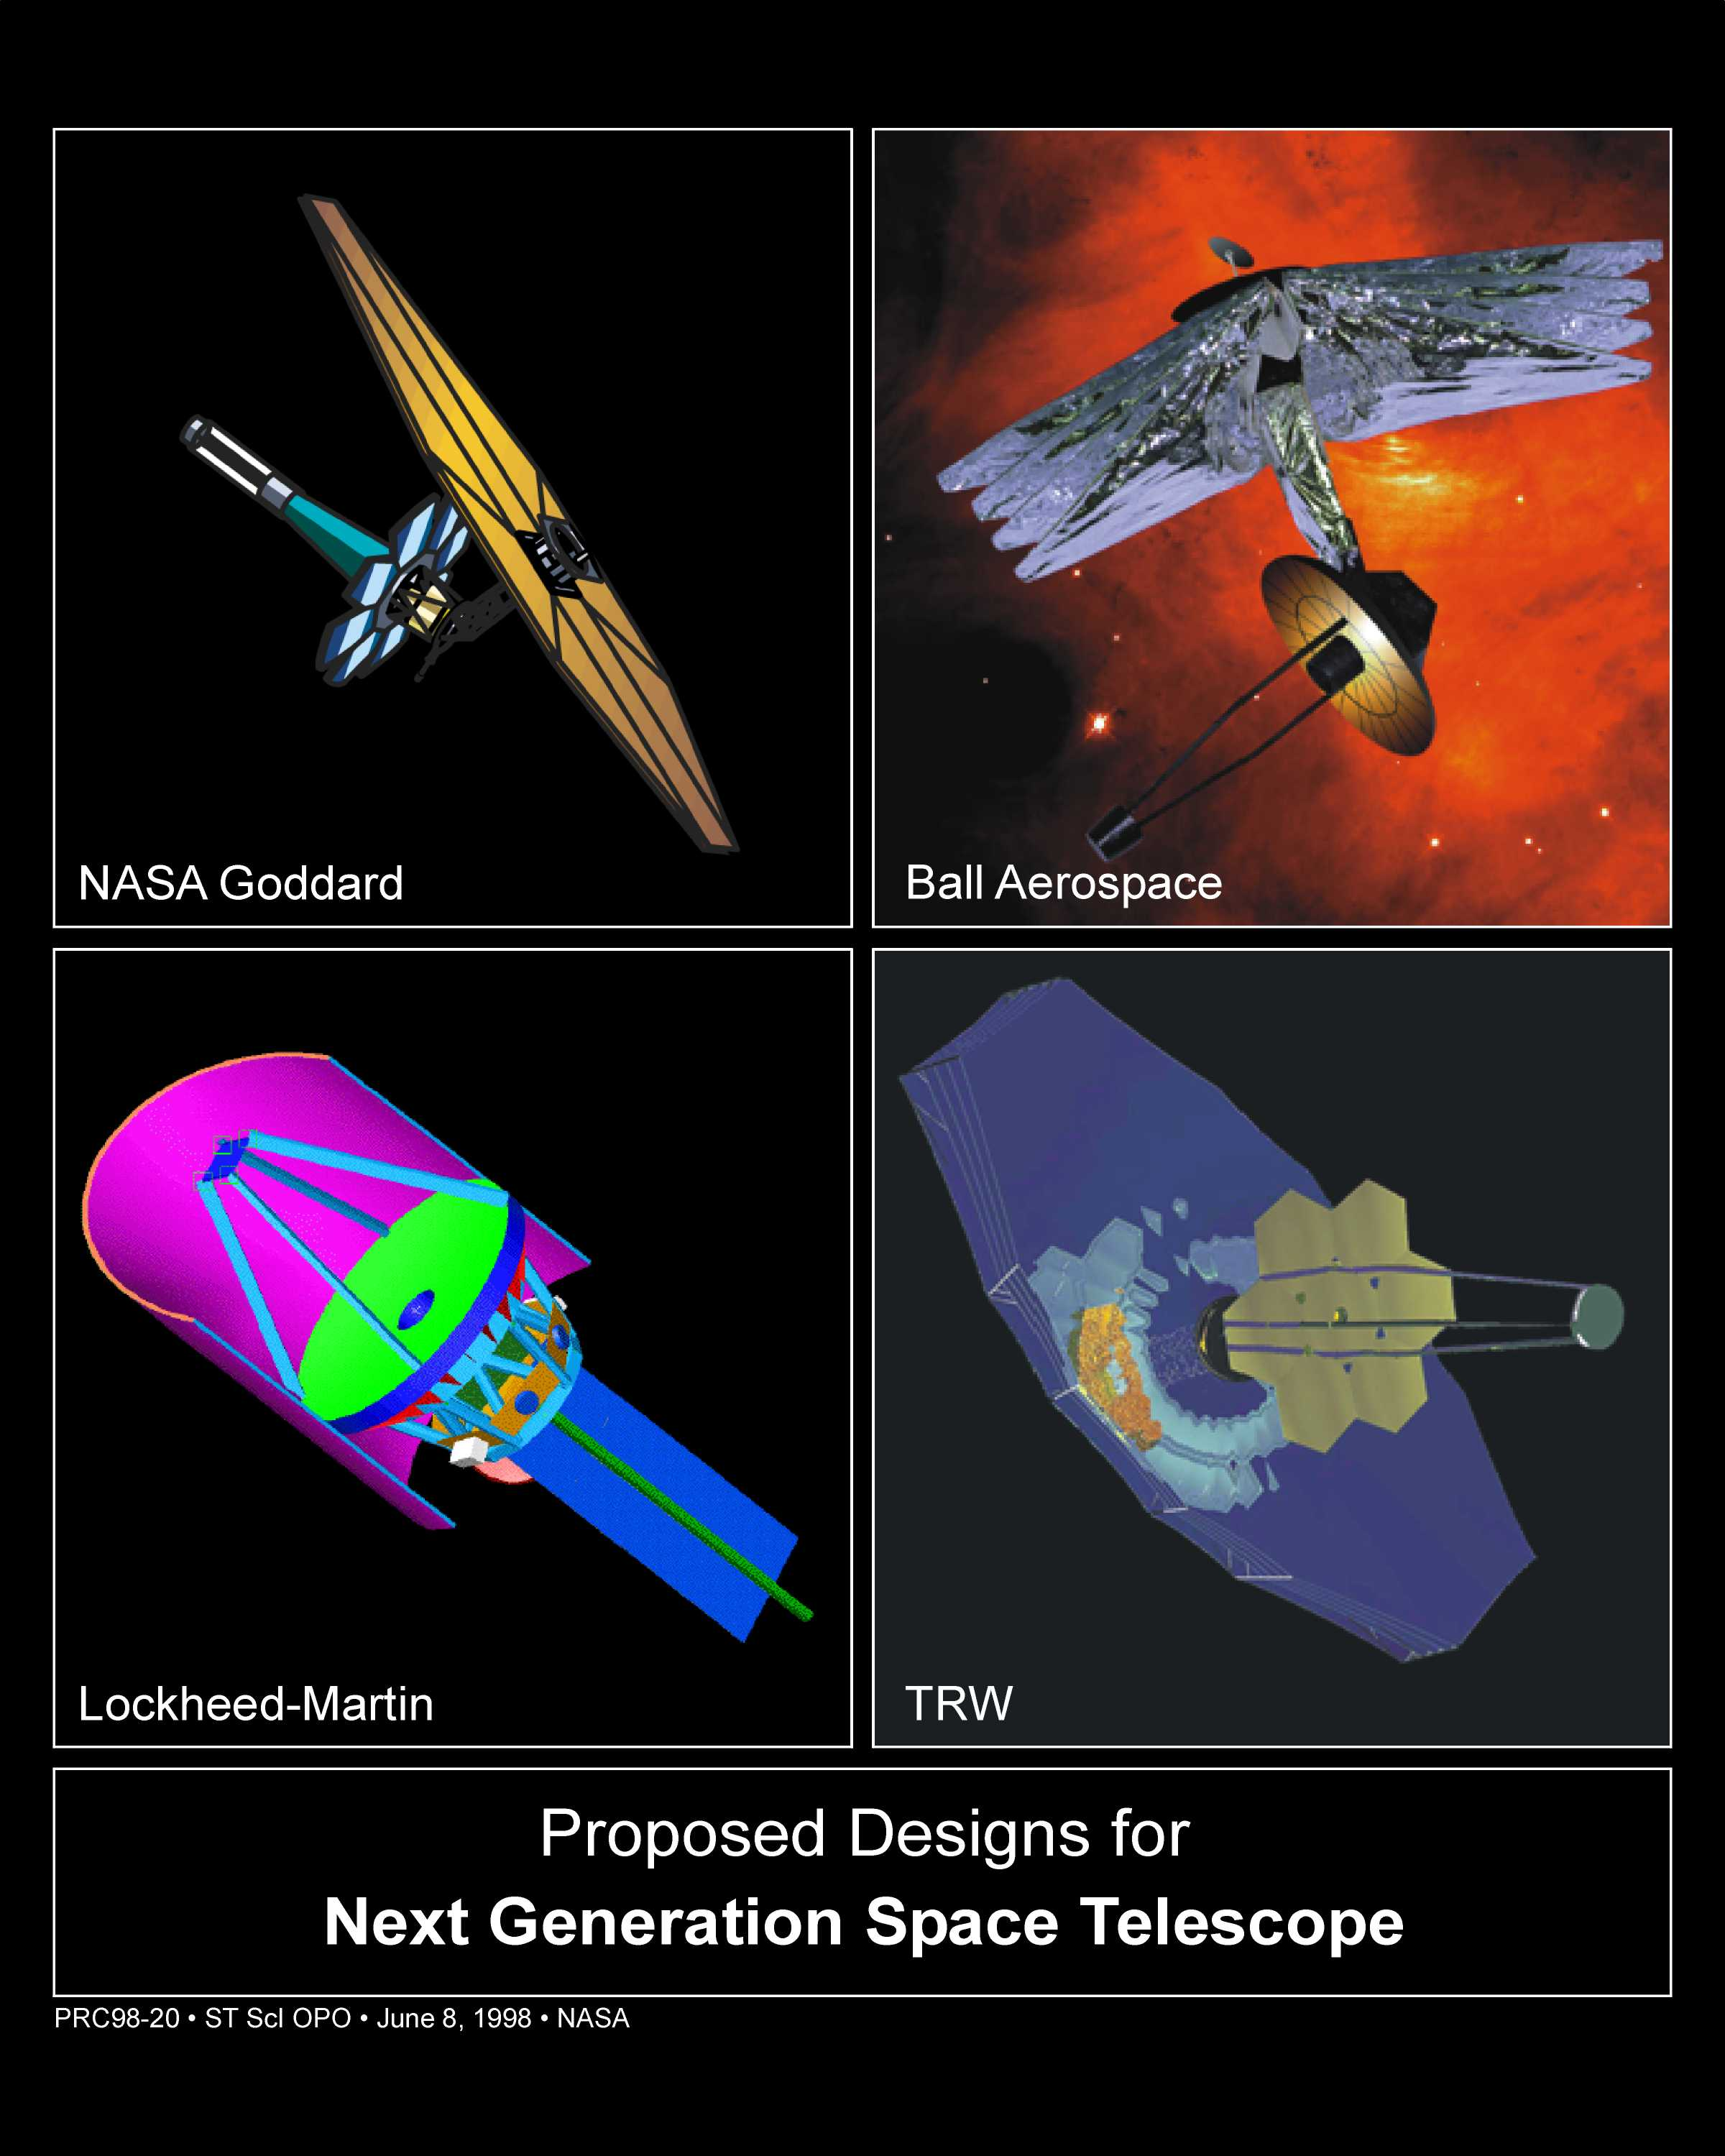

Proposed Designs for James Webb Space Telescope

Upper left: The Goddard Space Flight Center-led team developed this lightweight design for JWST. It incorporates many of the features found in the other designs: a deployable, 26-foot-wide (nearly 8 meters) primary mirror, a large deployable sunshade to shield the optics, and an orbit 930,000 miles (1.5 million kilometers) from Earth at the L2 Lagrangian point, a balancing point between the gravitational tug of the Earth and the Sun. The spacecraft has a deployable sunshade, an umbrella that will keep the telescope chilled -370 degrees Fahrenheit to -298 degrees Fahrenheit, which allows it to see the faint infrared glow of distant objects. With this design, the telescope can view about 40 percent of the sky at any time.

Upper right: This design by Ball Aerospace features four widely separated sunshields that are effective in reducing the temperature of the telescope optics and the science instrument compartment. The deployable primary mirror is mounted on three hinged slices of a 26-foot (8 meters) circular structure. By rolling the spacecraft so that the sunshade is always perpendicular to the Sun, the telescope can view half of the sky. The Ball model is designed for launch to L2 or similar orbits.

Credit: NASA/ESA